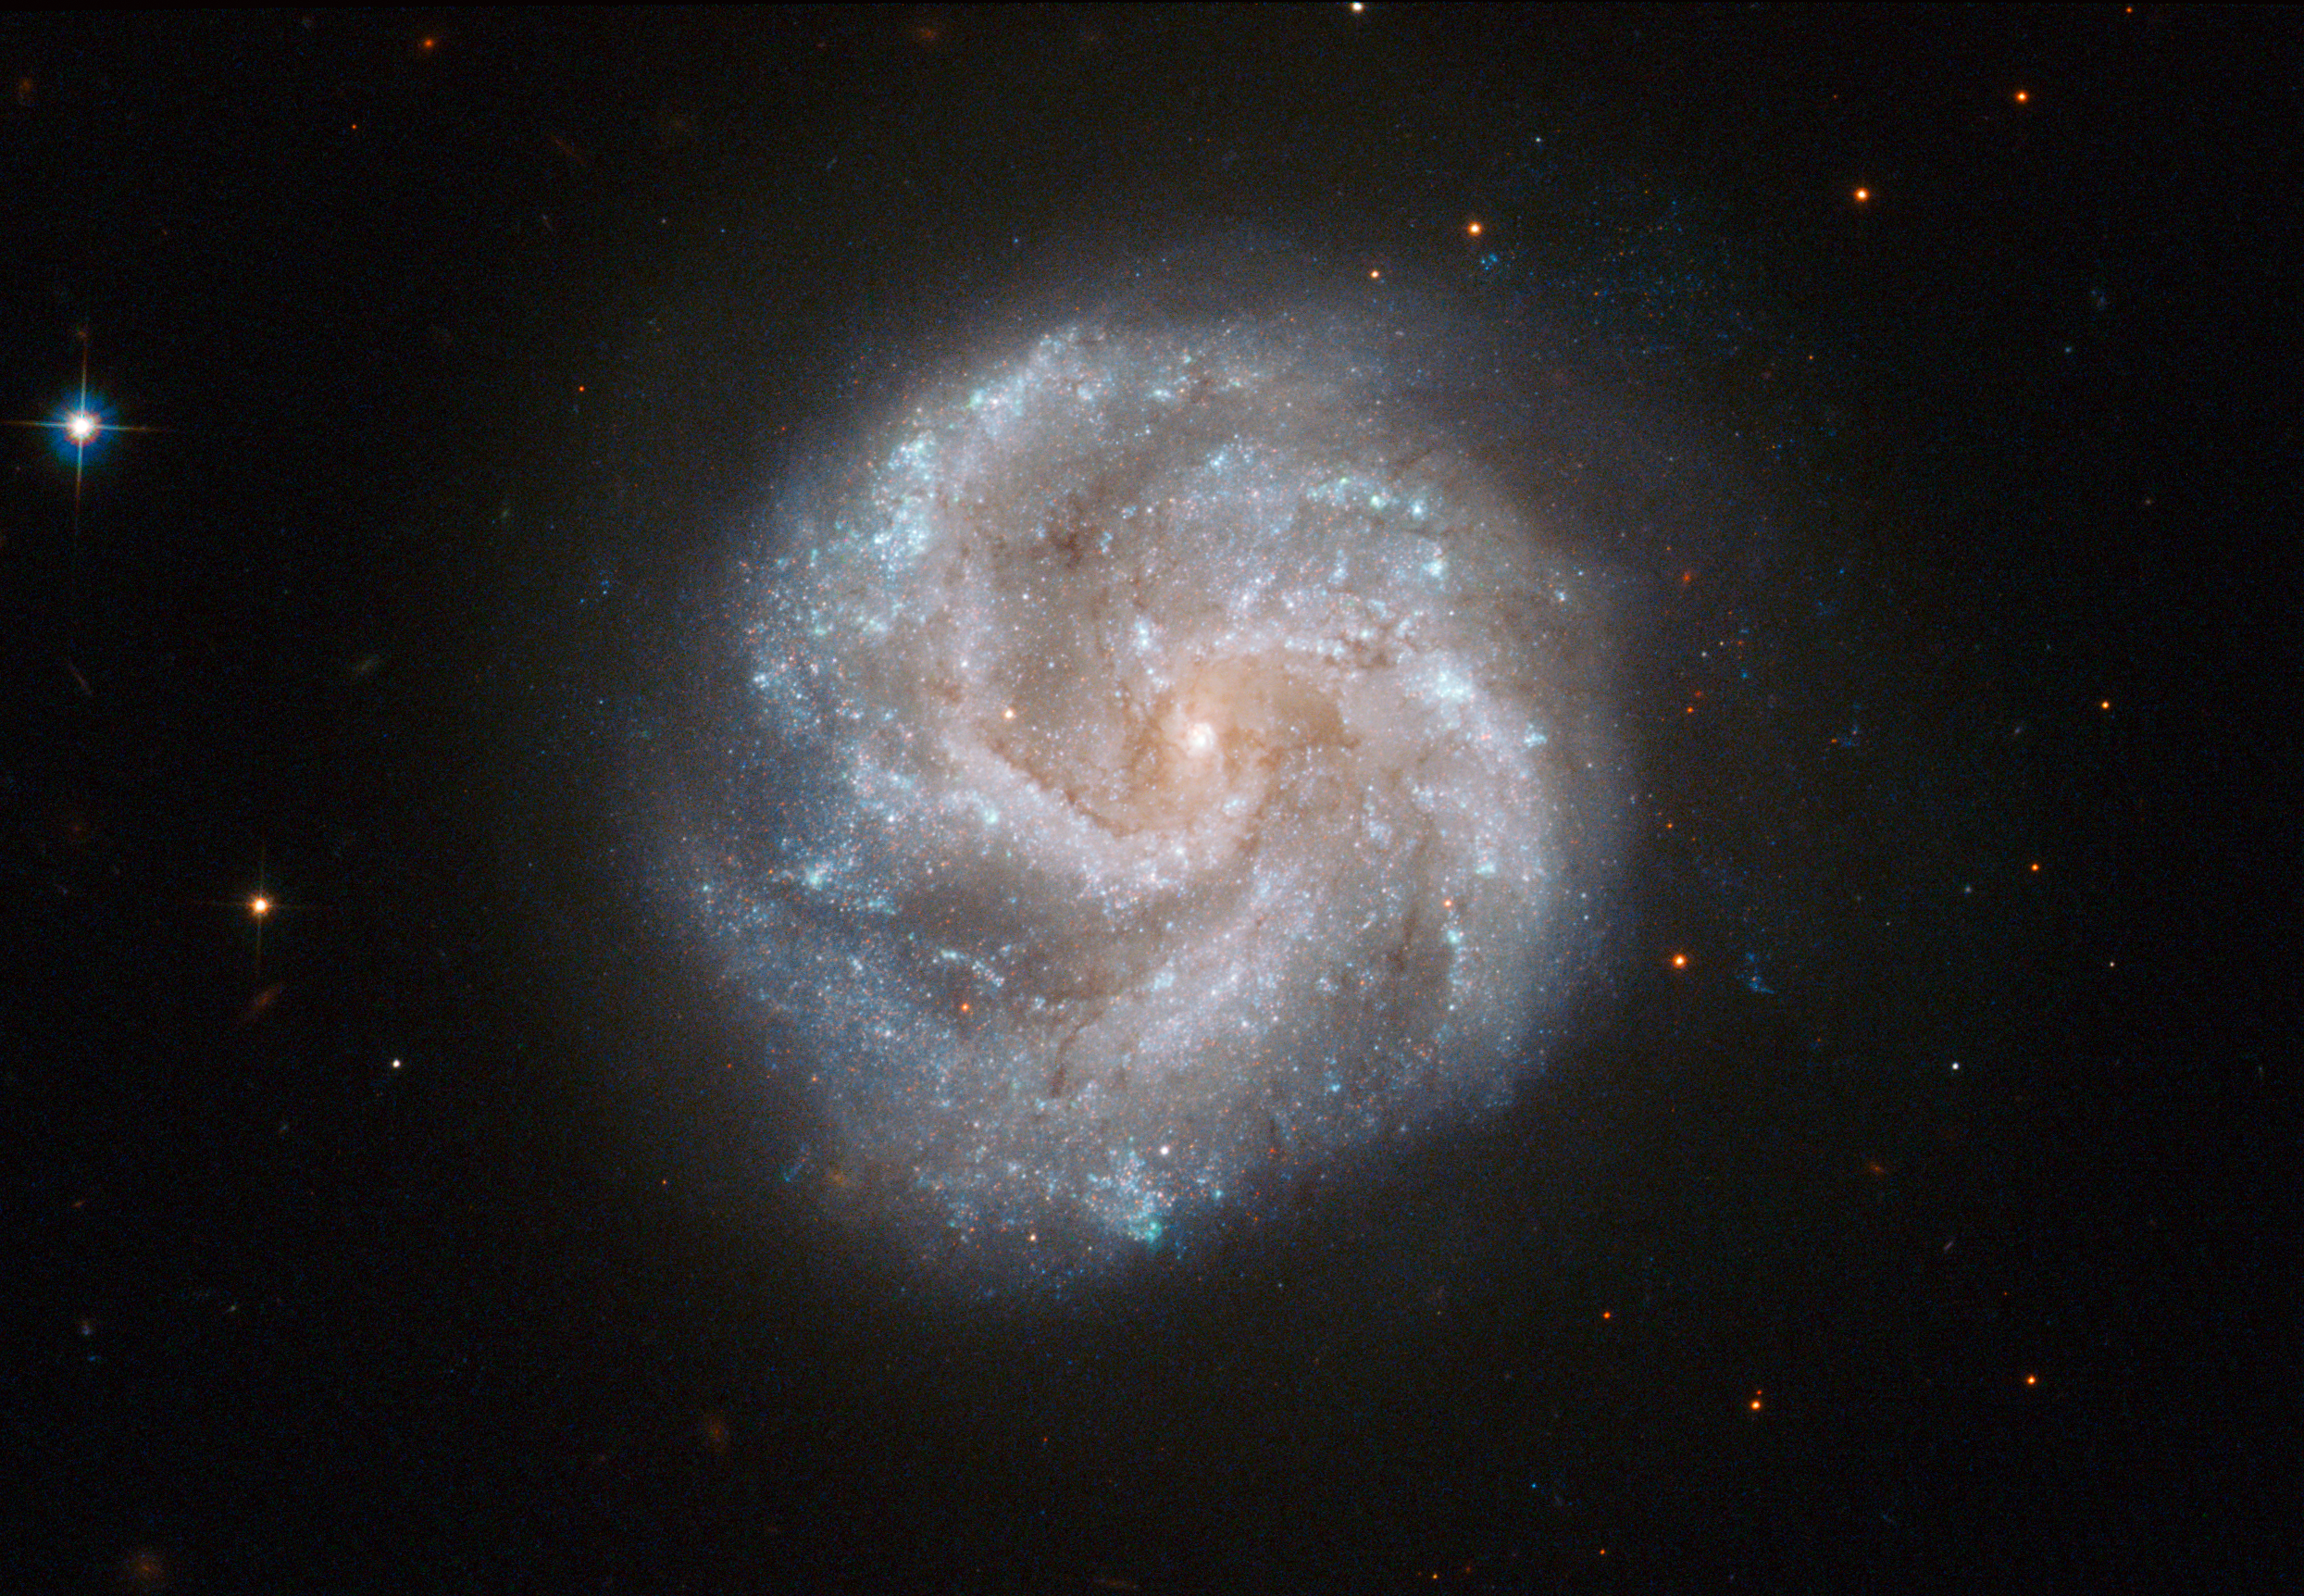

The star city that never sleeps

Hubble's Advanced Camera for Surveys has captured this moment in the ever-changing life of a spiral galaxy called IC 391. Although these massive star cities appear static and unchanging, their stellar inhabitants are constantly moving and evolving, with new stars being born and old stars reaching the ends of their lives —often in spectacular fashion, with an immense supernova explosion that can be viewed from Earth.

On 3 January 2001, members of the Beijing Astronomical Observatory discovered such an explosion within IC 391 and it was named SN 2001B. This was a Type Ib supernova, which occurs when a massive star runs out of fuel for nuclear fusion and collapses, emitting vast amounts of radiation and creating a powerful shock wave. Hubble has contributed much to our understanding of supernovae in recent years, and it has made an extensive study of supernova 1987A (heic0704), the brightest such stellar explosion to be seen from Earth in over 400 years.

IC 391 lies about 80 million light-years away in the constellation of Camelopardalis (the Giraffe) in the far northern part of the sky. The British amateur observer William Denning discovered it in the late nineteenth century, and described it as faint, small and round.

This picture was assembled from images taken with Hubble’s Wide Field Channel on the Advanced Camera for Surveys. Images through a blue filter (F435W) were coloured blue, those through a green filter (F555W) are shown as green and those through a near-infrared filter (F814W) are shown in red. The exposure times were 800 s, 700 s and 700 s respectively and the field of view is 2.1 by 1.4 arcminutes.

Credit: ESA/Hubble & NASA